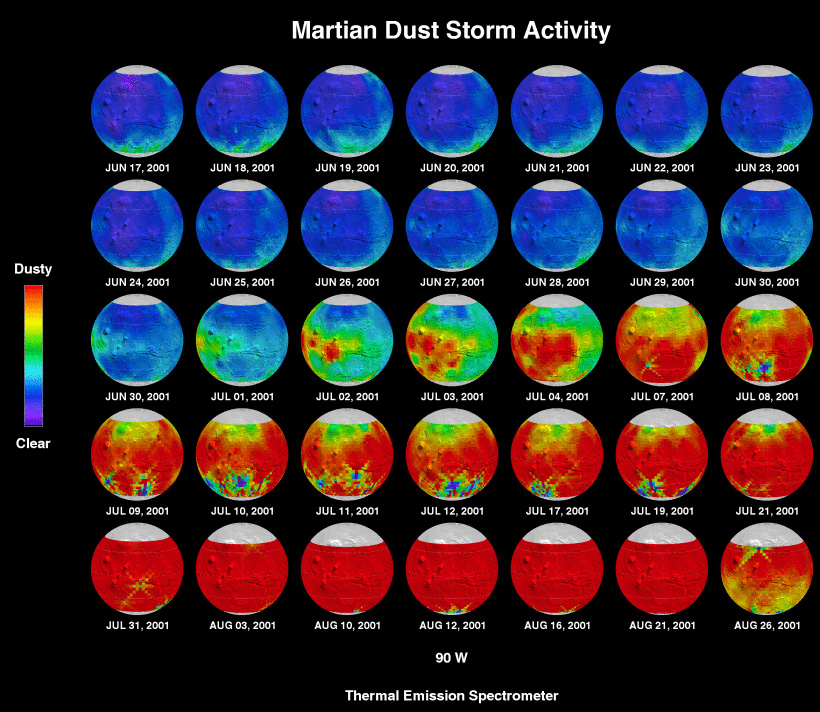

MGS/TES June-August sequence

Martian dust storm activity from June 17 to August 26, 2001.

A pair of eagle-eyed spacecraft - the NASA Mars Global Surveyor (MGS) and NASA/ESA Hubble Space Telescope - are giving amazed astronomers a ringside seat to the biggest global dust storm seen on Mars in several decades. The Martian dust storm, larger by far than any seen on Earth, has raised a cloud of dust that has engulfed the entire planet for several months.

Credit: Philip Christensen (Arizona State University) and the TES Team